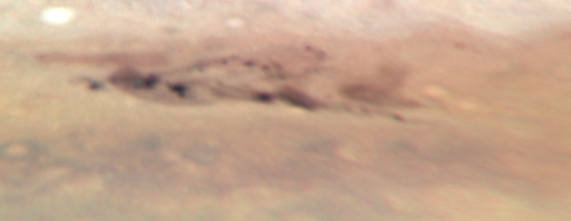

Jupiter: 8 August 2009

Image taken with Hubble's Wide Field Camera 3 on 8 August 2009.

Credit: NASA, ESA, M. Wong (University of California, Berkeley), H.B. Hammel (Space Science Institute, Boulder, Colo.), I. de Pater (University of California, Berkeley), and the Jupiter Impact Team